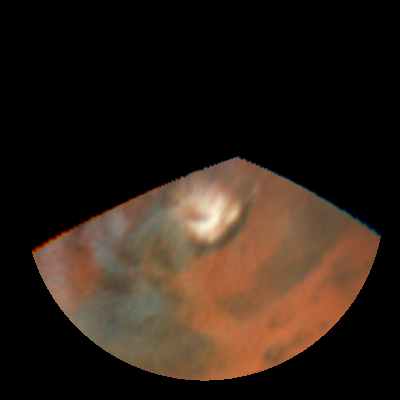

Rapid weather change observerd on Mars

NASA/ESA Hubble Space Telescope images of Mars obtained on July 11, 1997.

Credit: Steve Lee (Univ. Colorado), Phil James (Univ. Toledo), and Todd Clancy (Space Science Inst.)